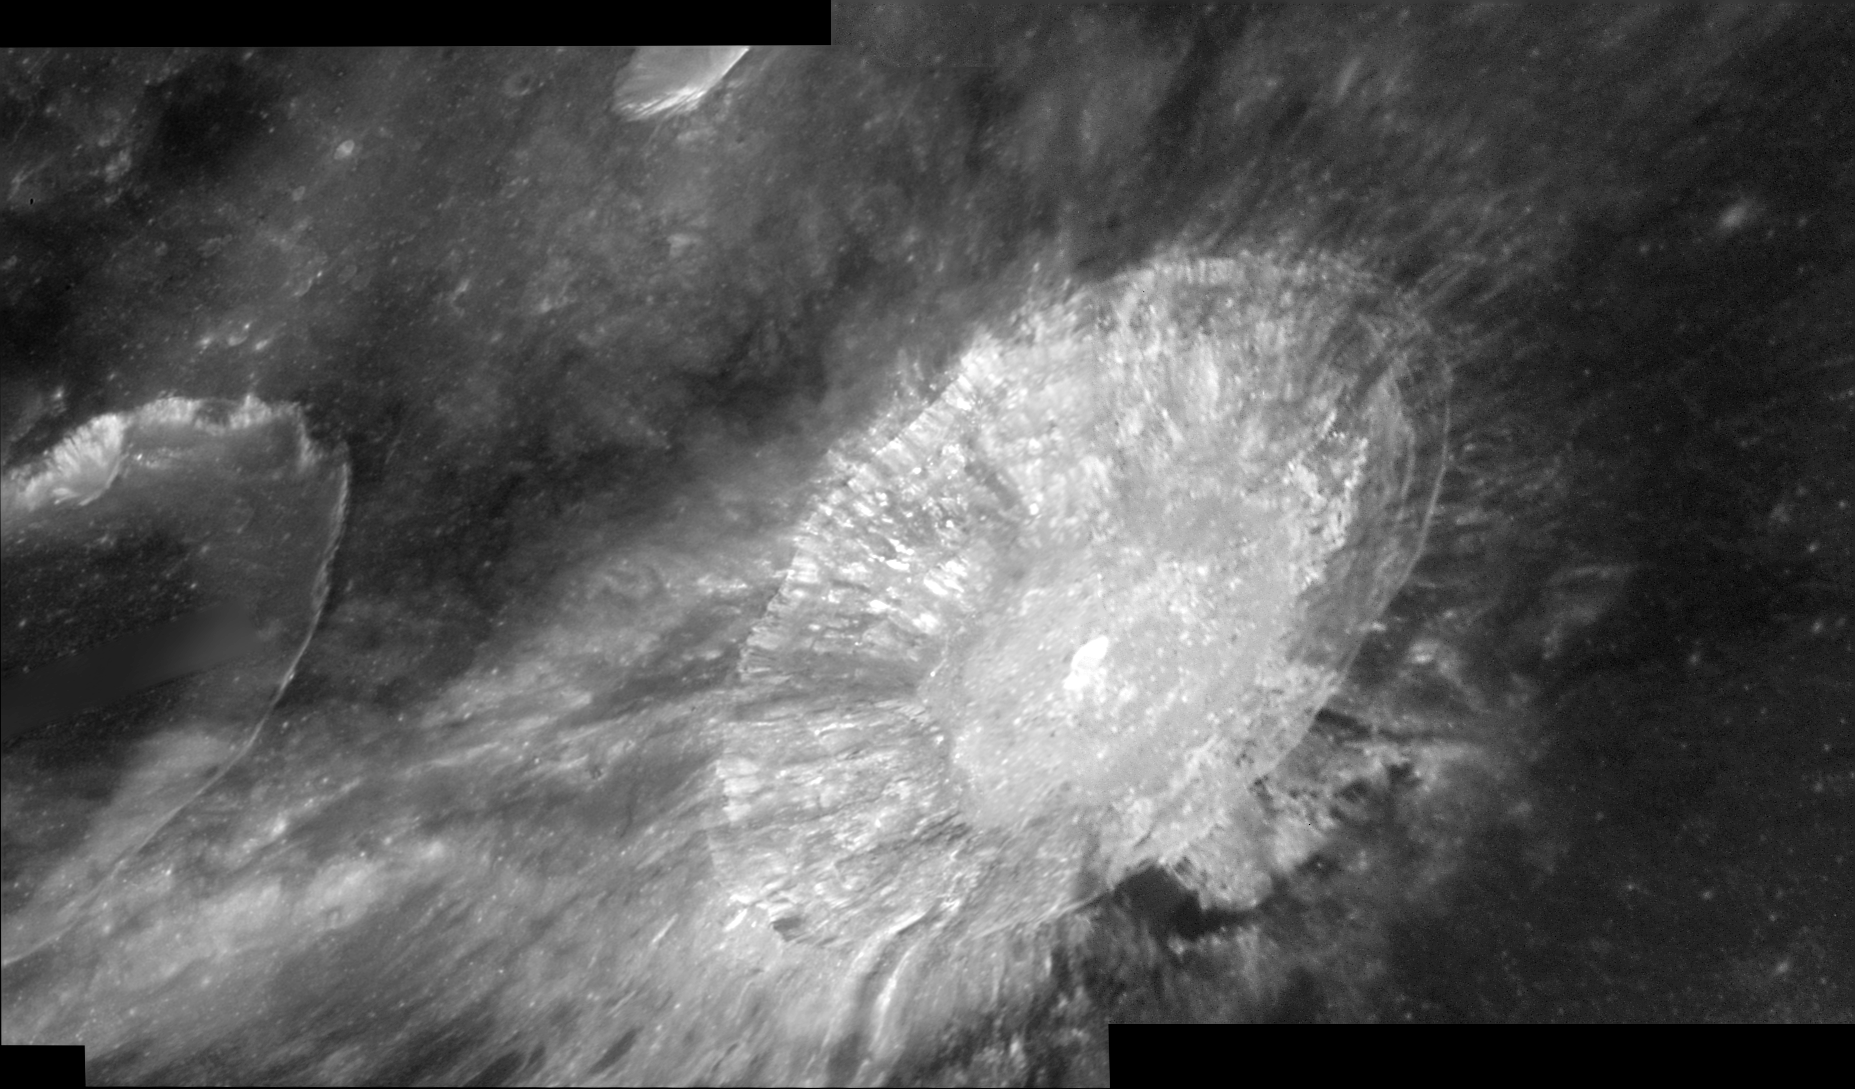

A Close-Up View of the Aristarchus Crater

The Hubble Space Telescope's Advanced Camera for Surveys snapped this close-up view of the Aristarchus crater on Aug. 21, 2005. The crater is 26 miles (42 kilometers) in diameter and approximately 2 miles (3.2 kilometers) in depth, and sits at the southeastern edge of the Aristarchus Plateau. Aristarchus is one of the youngest and largest craters on the Moon. The crater formed between 100 and 900 million years ago.

Credit: NASA, ESA, and J. Garvin (NASA/GSFC)